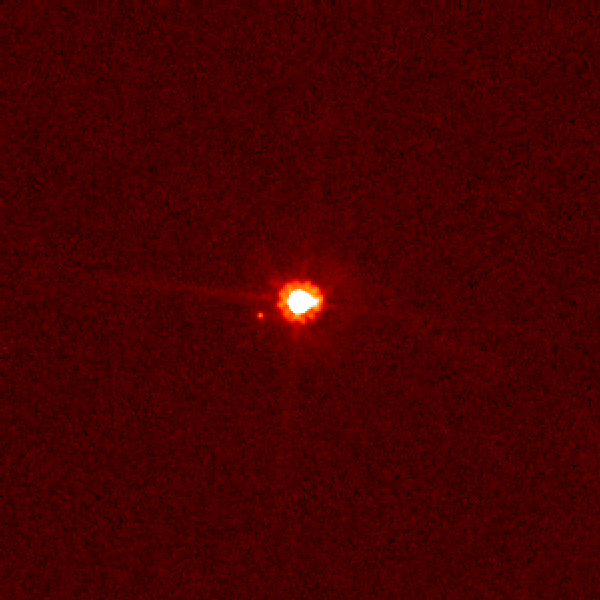

Hubble view of Eris and Dysnomia (unannotated)

This is an image of the dwarf planet Eris (centre) and its satellite Dysnomia (at 9 o'clock position) taken with NASA/ESA's Hubble Space Telescope on Aug. 30, 2006. Hubble observations were obtained on Dec. 3, 2005 and Aug. 30, 2006 using the Advanced Camera for Surveys. The Hubble images were combined with images from the Keck telescopes taken on Aug. 20, 21, 30, and 31 to measure the satellite's orbit and calculate a mass for Eris, which is the largest dwarf planet in the solar system.

Credit: NASA, ESA, and M. Brown (California Institute of Technology)